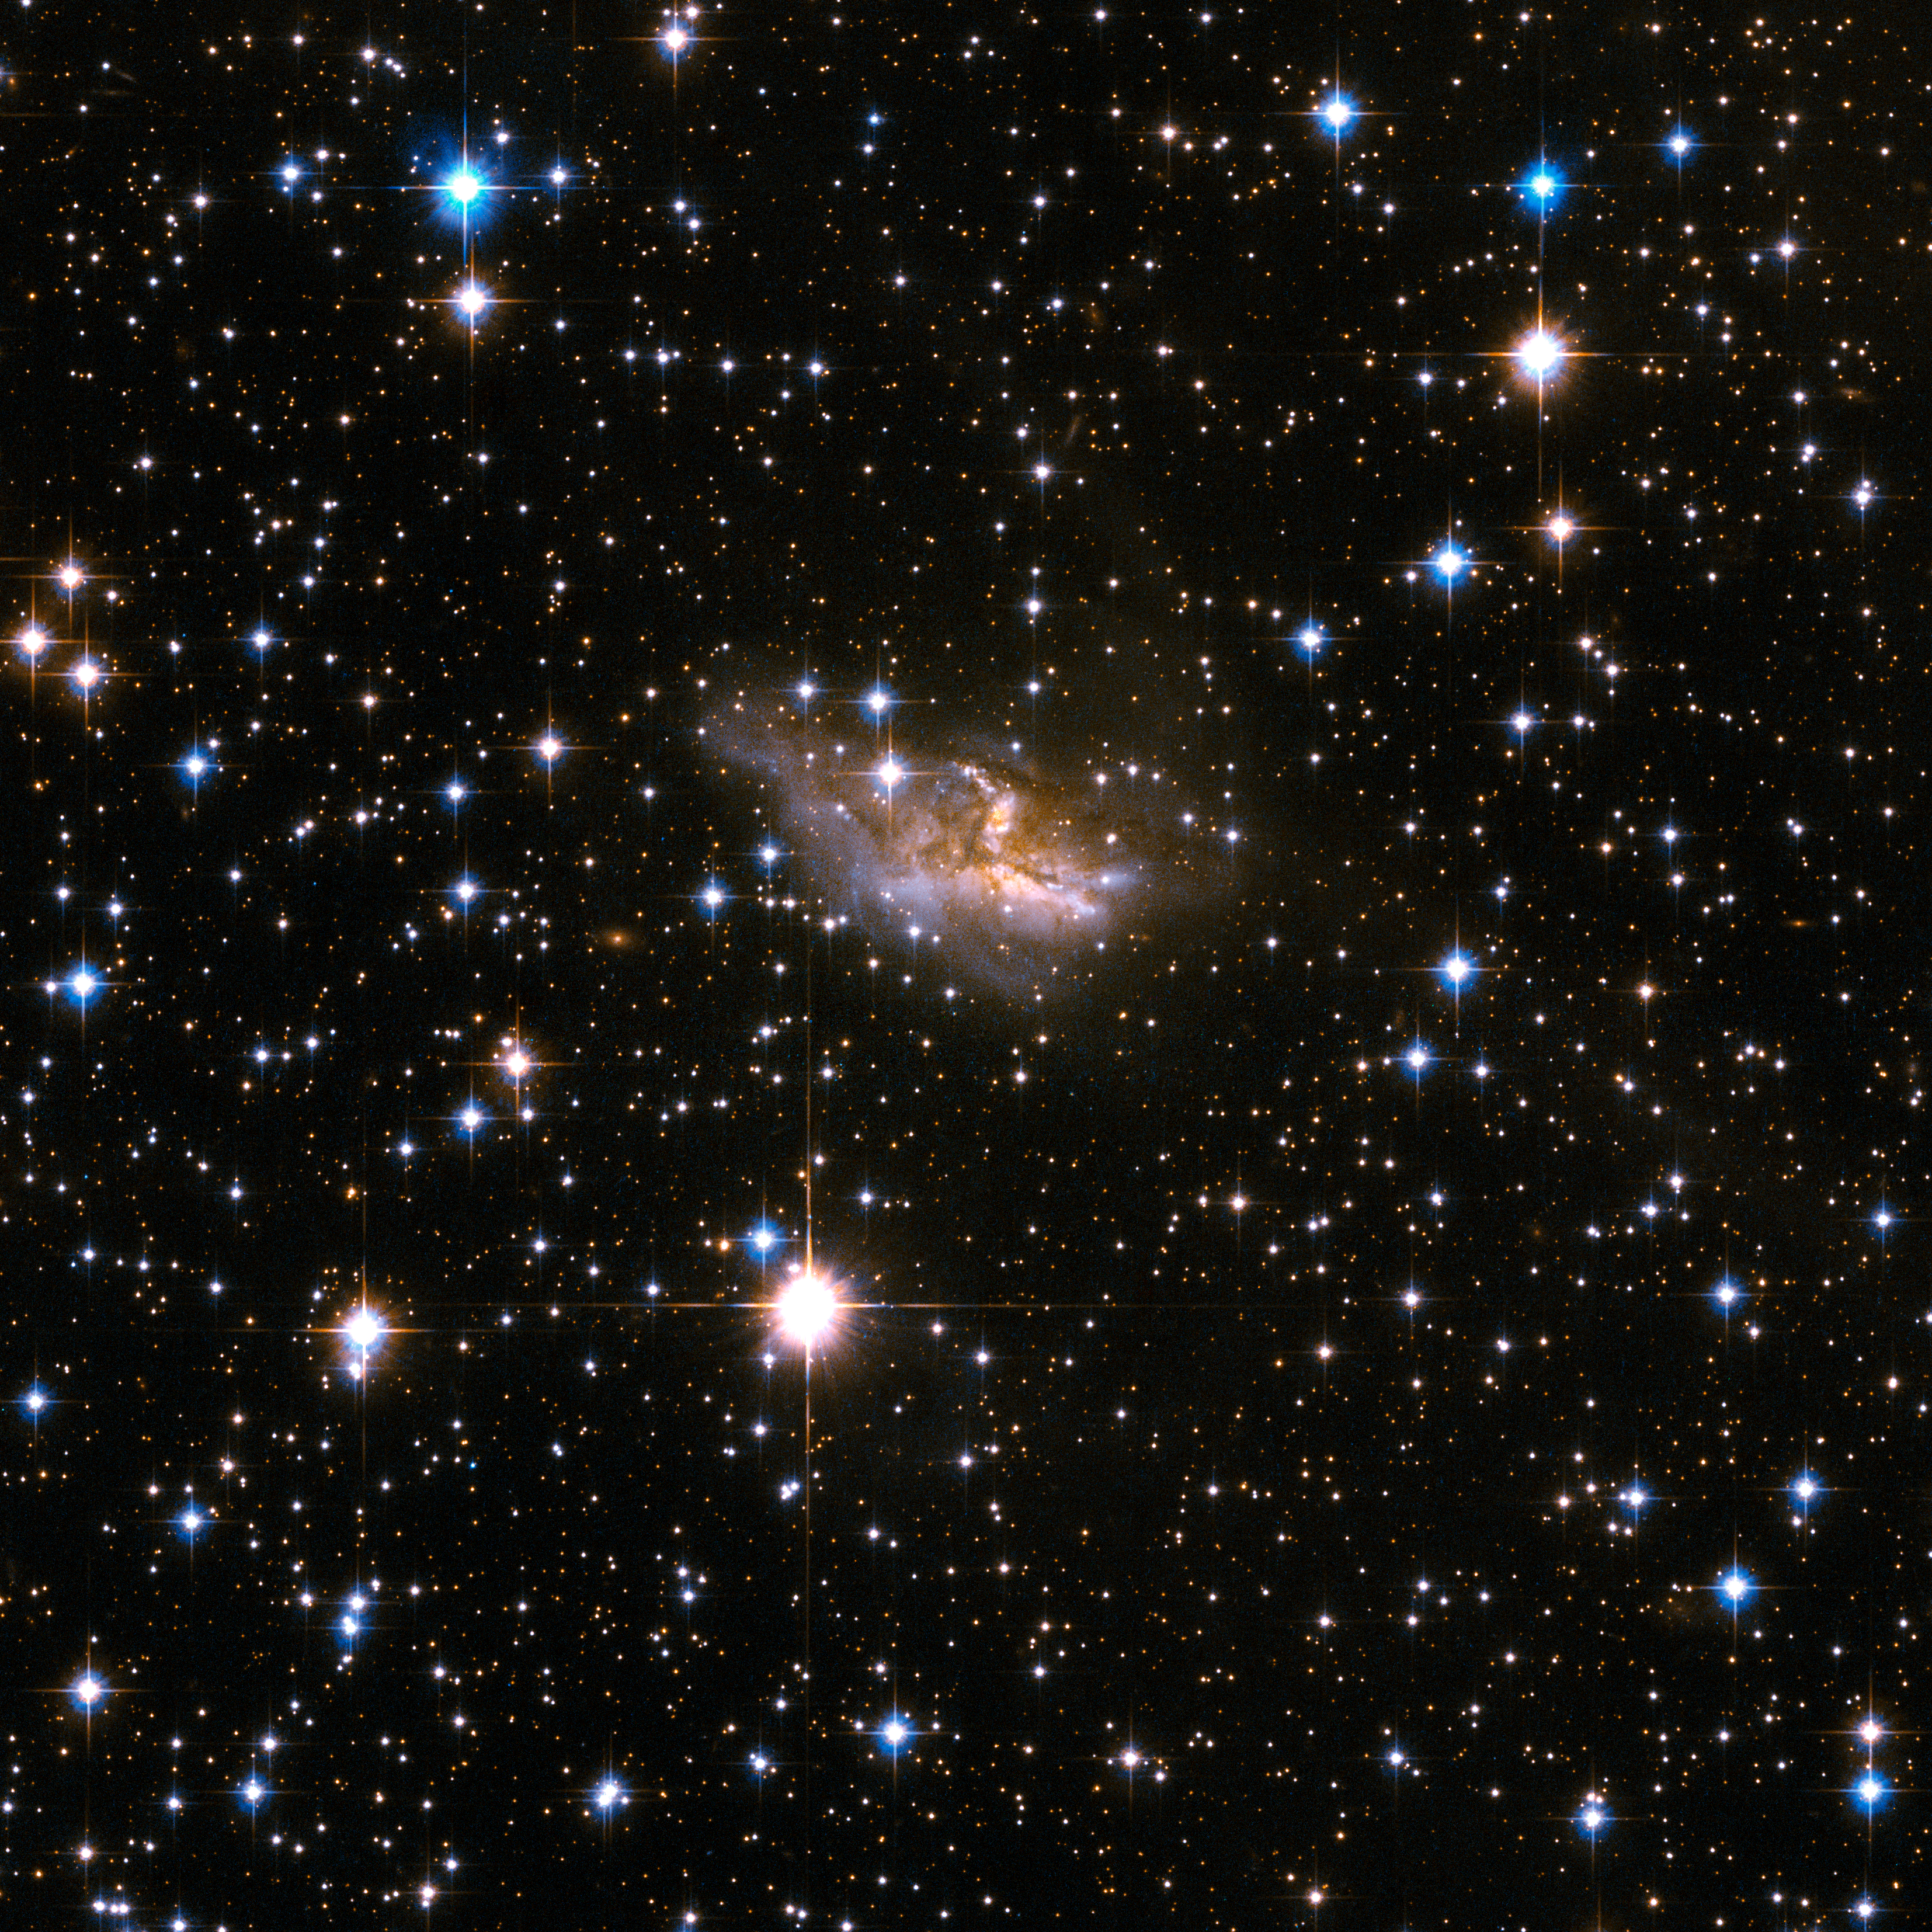

ESO 99-4

ESO 99-4 is a galaxy with a highly peculiar shape that is probably the remnant of an earlier merger process that has deformed it beyond visual recognition, leaving the main body largely obscured by dark bands of dust. ESO 99-4 lies in a rich field of foreground stars, in the constellation of Triangulum Australe, the Southern Triangle, about 400 million light-years away.

This image is part of a large collection of 59 images of merging galaxies taken by the Hubble Space Telescope and released on the occasion of its 18th anniversary on 24th April 2008.

Credit: NASA, ESA, the Hubble Heritage Team (STScI/AURA)-ESA/Hubble Collaboration and A. Evans (University of Virginia, Charlottesville/NRAO/Stony Brook University)